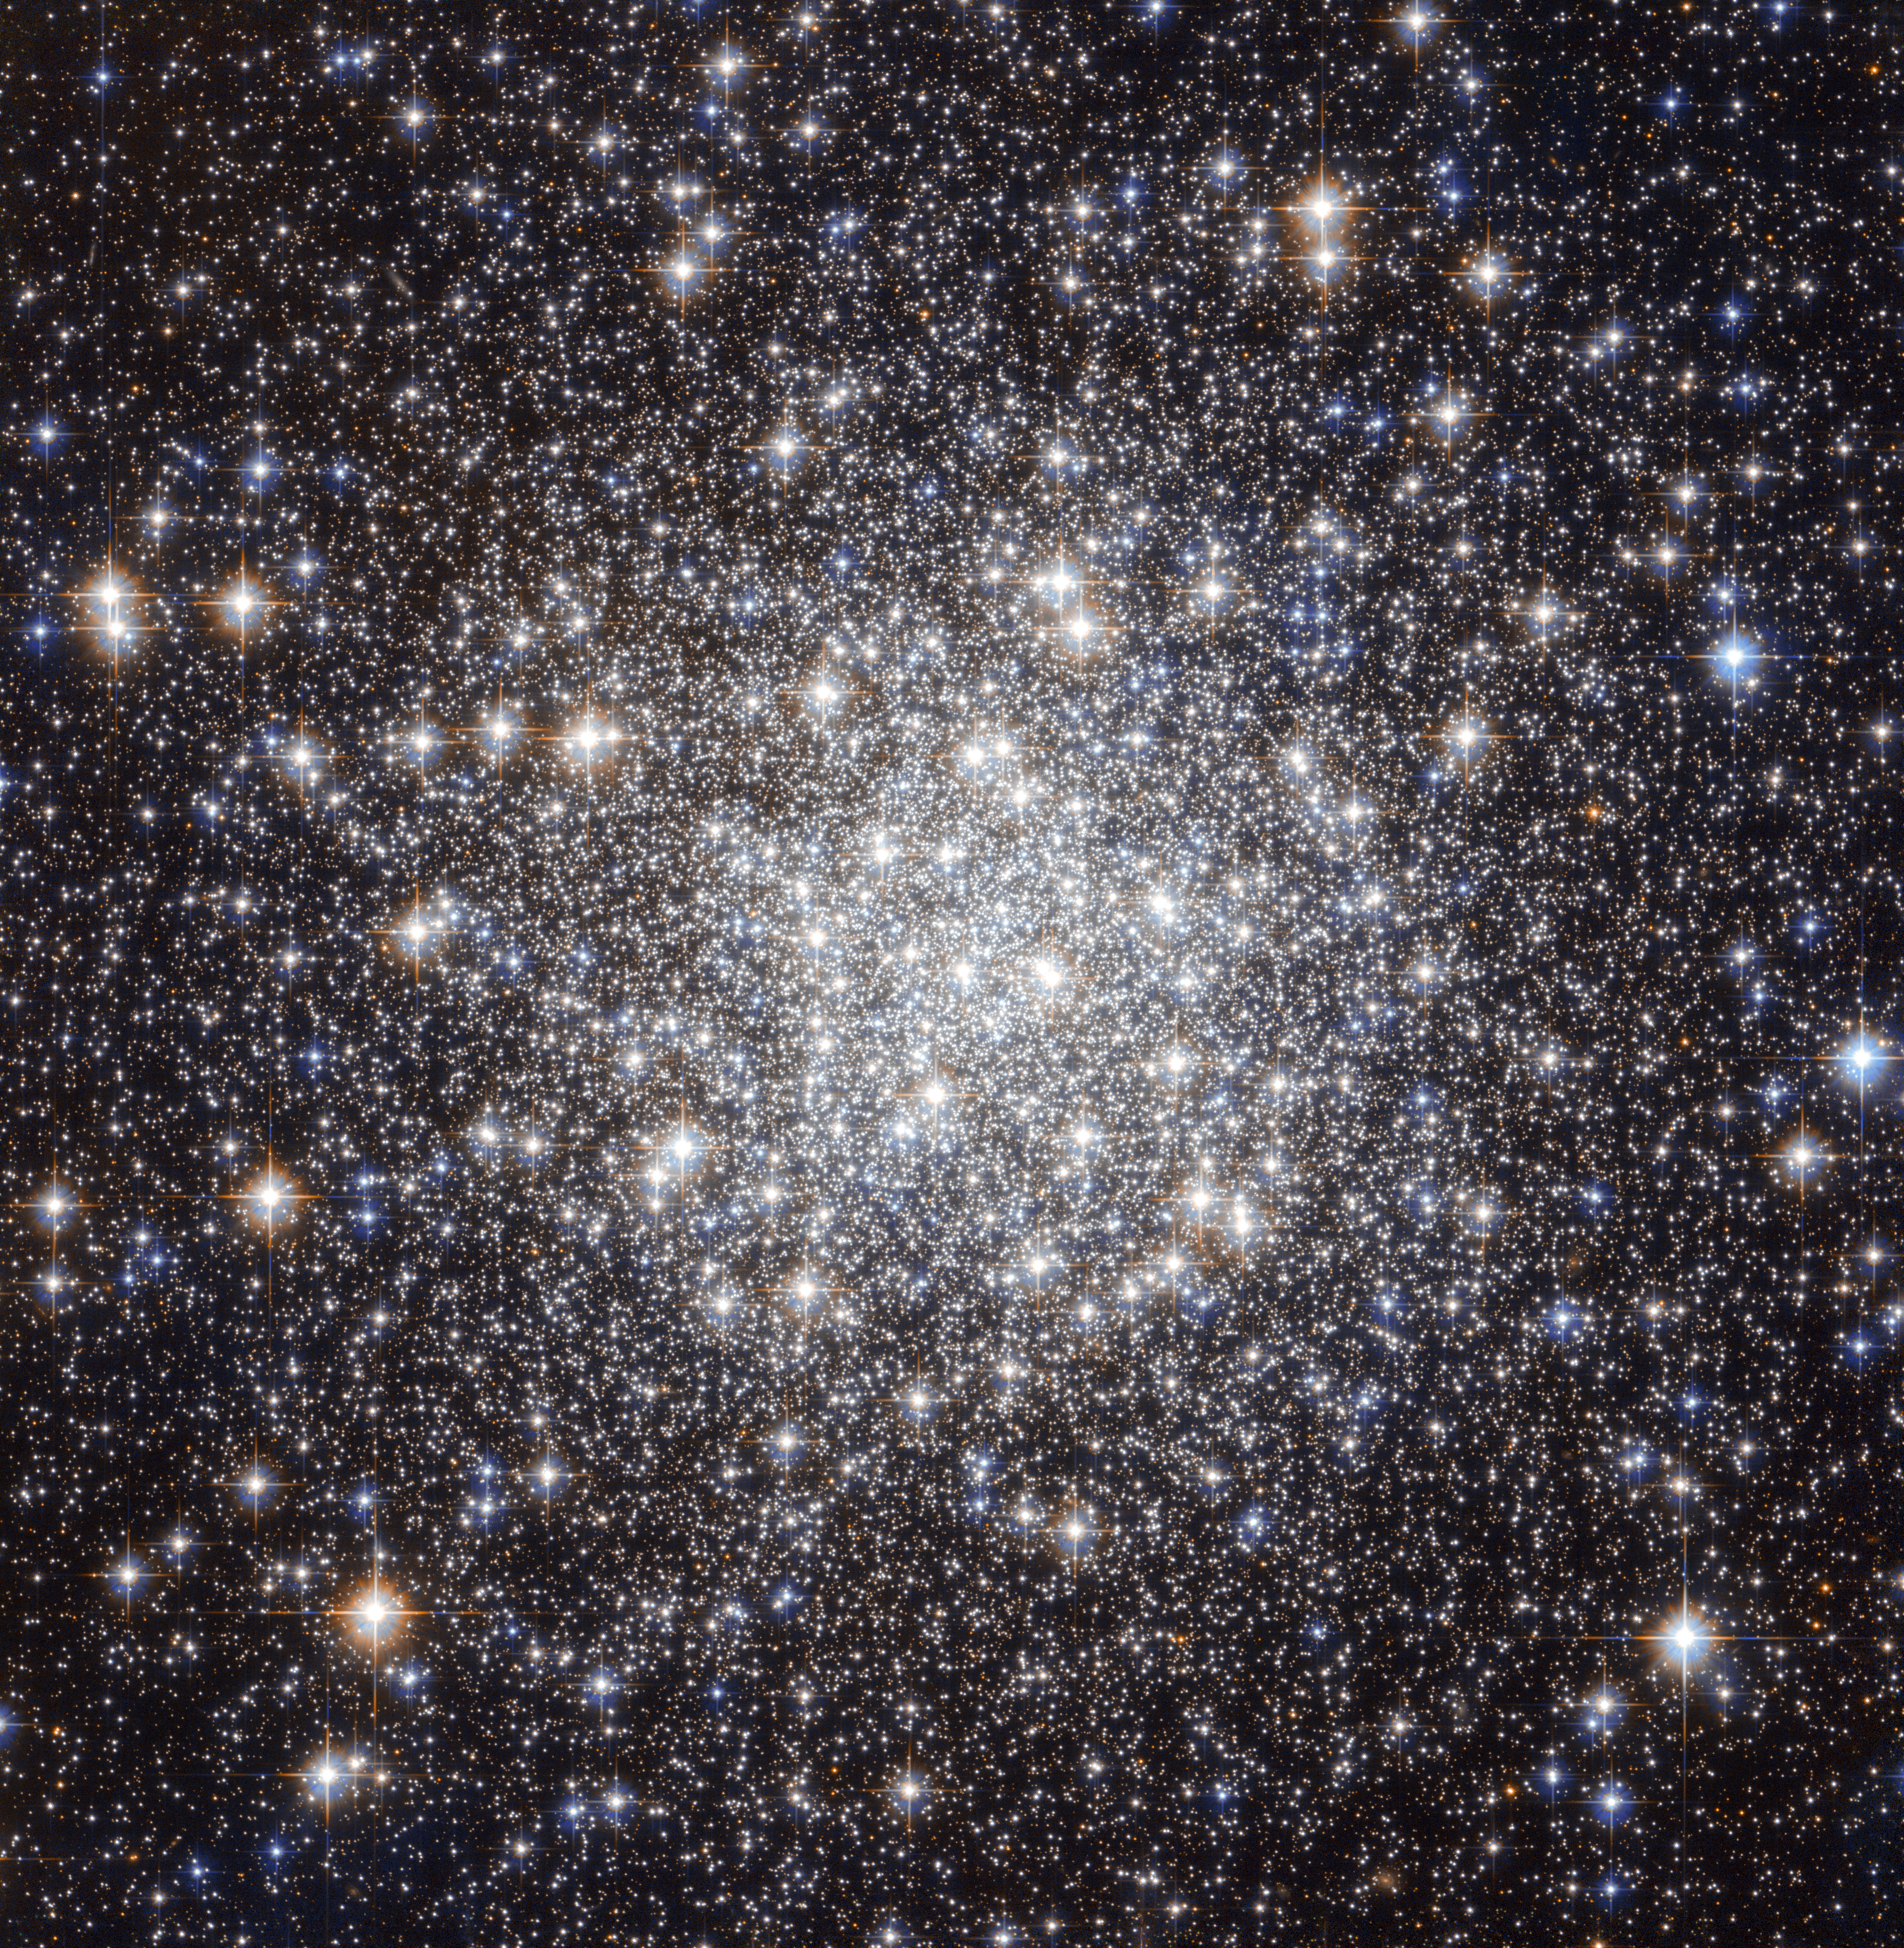

A collection of ancient stars

The NASA/ESA Hubble Space Telescope has produced this beautiful image of the globular cluster Messier 56 (also known as M 56 or NGC 6779), which is located about 33 000 light years away from the Earth in the constellation of Lyra (The Lyre). The cluster is composed of a large number of stars, tightly bound to each other by gravity.

However, this was not known when Charles Messier first observed it in January 1779. He described Messier 56 as “a nebula without stars”, like most globular clusters that he discovered — his telescope was not powerful enough to individually resolve any of the stars visible here, making it look like a fuzzy ball through his telescope’s eyepiece. We clearly see from Hubble’s image how the development of technology over the years has helped our understanding of astronomical objects.

Astronomers typically infer important properties of globular clusters by looking at the light of their constituent stars. But they have to be very careful when they observe objects like Messier 56, which is located close to the Galactic plane. This region is crowded by “field-stars”, in other words, stars in the Milky Way that happen to lie in the same direction but do not belong to the cluster. These objects can contaminate the light, and hence undermine the conclusions reached by astronomers.

A tool often used by scientists for studying stellar clusters is the colour-magnitude (or Hertzsprung-Russell) diagram. This chart compares the brightness and colour of stars – which in turn, tells scientists what the surface temperature of a star is.

By comparing high quality observations taken with the Hubble Space Telescope with results from the standard theory of stellar evolution, astronomers can characterise the properties of a cluster. In the case of Messier 56, this includes its age, which at 13 billion years is approximately three times the age of the Sun. Furthermore, they have also been able to study the chemical composition of Messier 56. The cluster has relatively few elements heavier than hydrogen and helium, typically a sign of stars that were born early in the Universe’s history, before many of the elements in existence today were formed in significant quantities.

Astronomers have found that the majority of clusters with this type of chemical makeup lie along a plane in the Milky Way’s halo. This suggests that such clusters were captured from a satellite galaxy, rather than being the oldest members of the Milky Way's globular cluster system as had been previously thought.

This image consists of visible and near-infrared exposures from Hubble’s Advanced Camera for Surveys. The field of view is approximately 3.3 by 3.3 arcminutes.

A version of this image was entered into the Hubble’s Hidden Treasures Image Processing Competition by contestant Gilles Chapdelaine. Hidden Treasures is an initiative to invite astronomy enthusiasts to search the Hubble archive for stunning images that have never been seen by the general public. The competition has now closed and the results will be published soon.

Credit: NASA & ESA
Acknowledgement: Gilles Chapdelaine